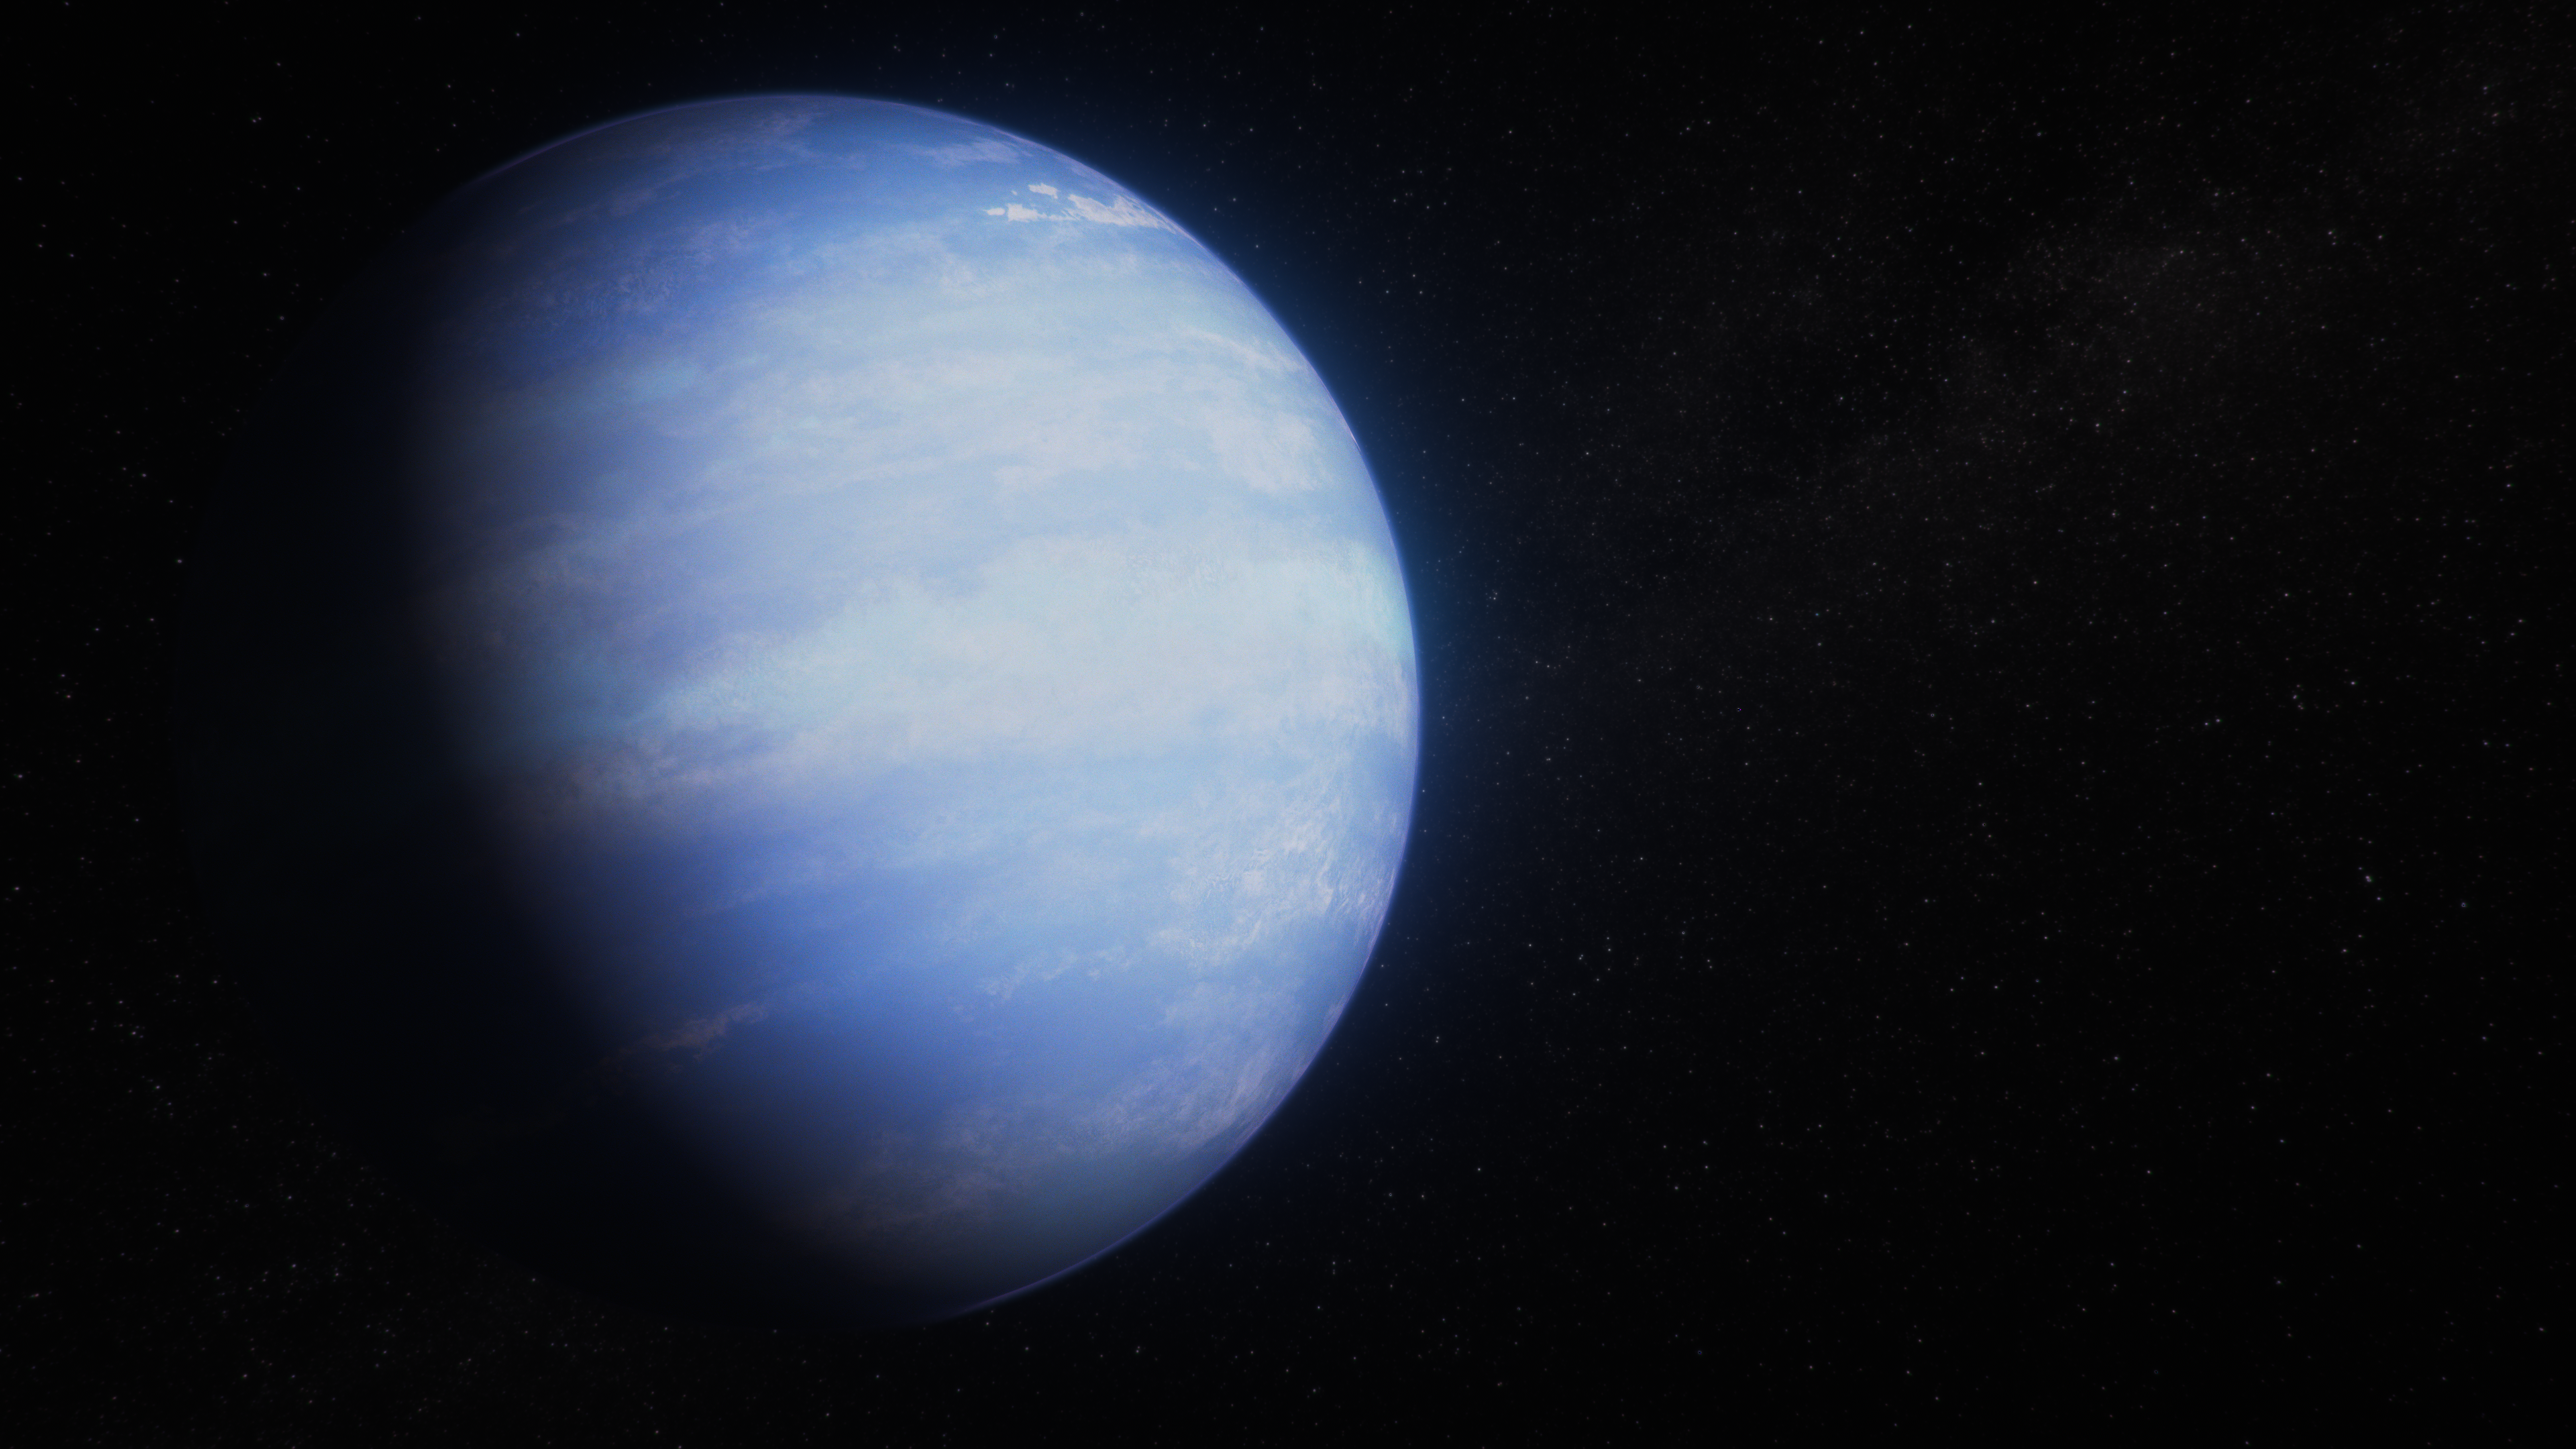

Warm Gas-Giant Exoplanet WASP-107 b (Artist’s Concept)

This artist’s concept shows what the exoplanet WASP-107 b could look like based on recent data gathered by NASA’s James Webb Space Telescope along with previous observations from Hubble and other space- and ground-based telescopes.

WASP-107 b is a -warm Neptune’ exoplanet orbiting a relatively small and cool star approximately 210 light-years from Earth, in the constellation Virgo. The planet is about 80% of the size of Jupiter in terms of volume, but has a mass less than 10% of Jupiter’s, making it one of the least dense exoplanets known.

WASP-107 b orbits its star at a distance about 5 million miles (0.055 astronomical units, or AU), completing one circuit in 5.72 days. The planet is tidally locked: it rotates at the same rate that it orbits the star, which means that one side is permanently lit, with the other in continuous darkness, so there is no day–night cycle. The orbit of WASP-107 b is slightly elliptical, which means that the gravitational pull between the star and planet changes continuously as the planet moves toward and away from the star during its orbit.

Observations of 0.8- to 12-micron infrared light captured by the NASA/ESA Hubble Space Telescope’s WFC3 (Wide Field Camera 3), and Webb’s NIRCam (Near-Infrared Camera), NIRSpec (Near-Infrared Spectrograph), and MIRI (Mid-Infrared Instrument), suggest that the planet has a relatively large core surrounded by a relatively small mass of hydrogen and helium gas, which has been inflated by tidal heating of the interior.

WASP-107 b has not been directly imaged by any telescope.

Credit: NASA, ESA, CSA, R. Crawford (STScI)